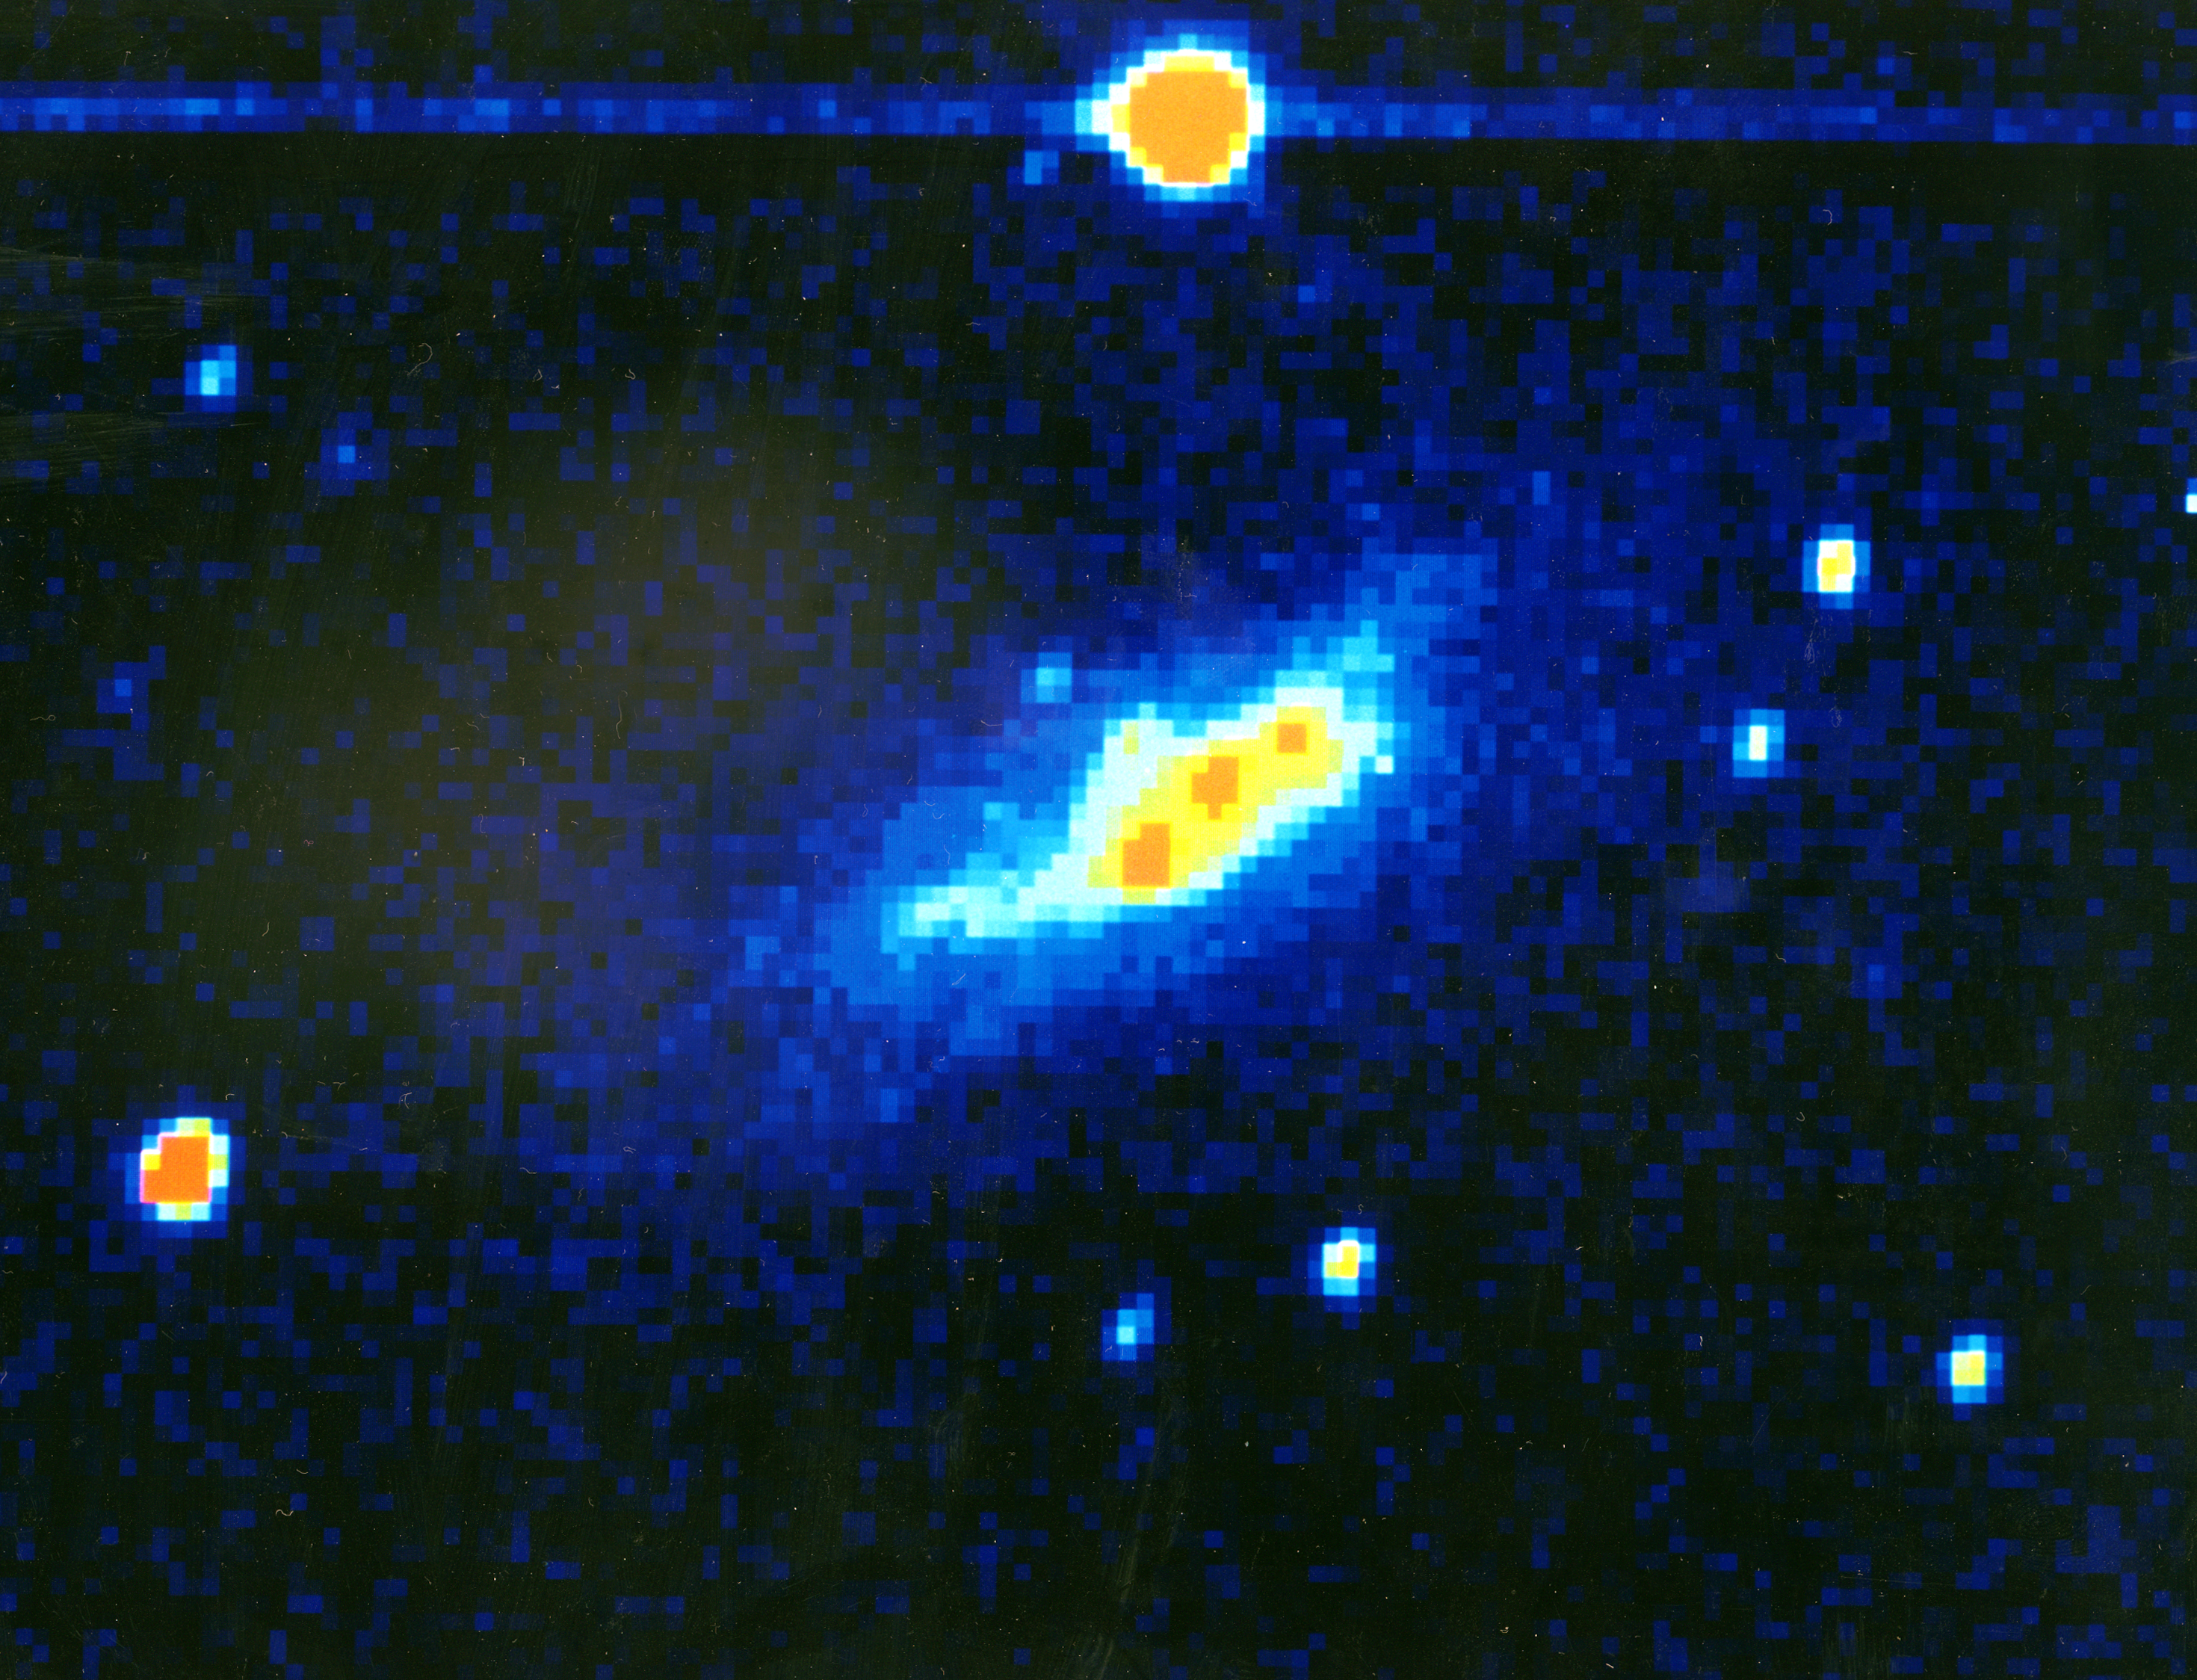

Starburst galaxy

An infrared image of the nearby starburst galaxy NGC 1569. Starburst galaxies undergo periods of intense star formation. The starburst activity in NGC 1569 is concentrated into three giant regions which are clearly visible as three red knots in the false colour image.

These same starburst regions likely contain the massive X-ray binary stars which may be responsible for part of the mysterious X-ray background that permeates the universe.

Credit: Antonelia Fruscione, Richard Grifliths and John MacKenty (STScI)